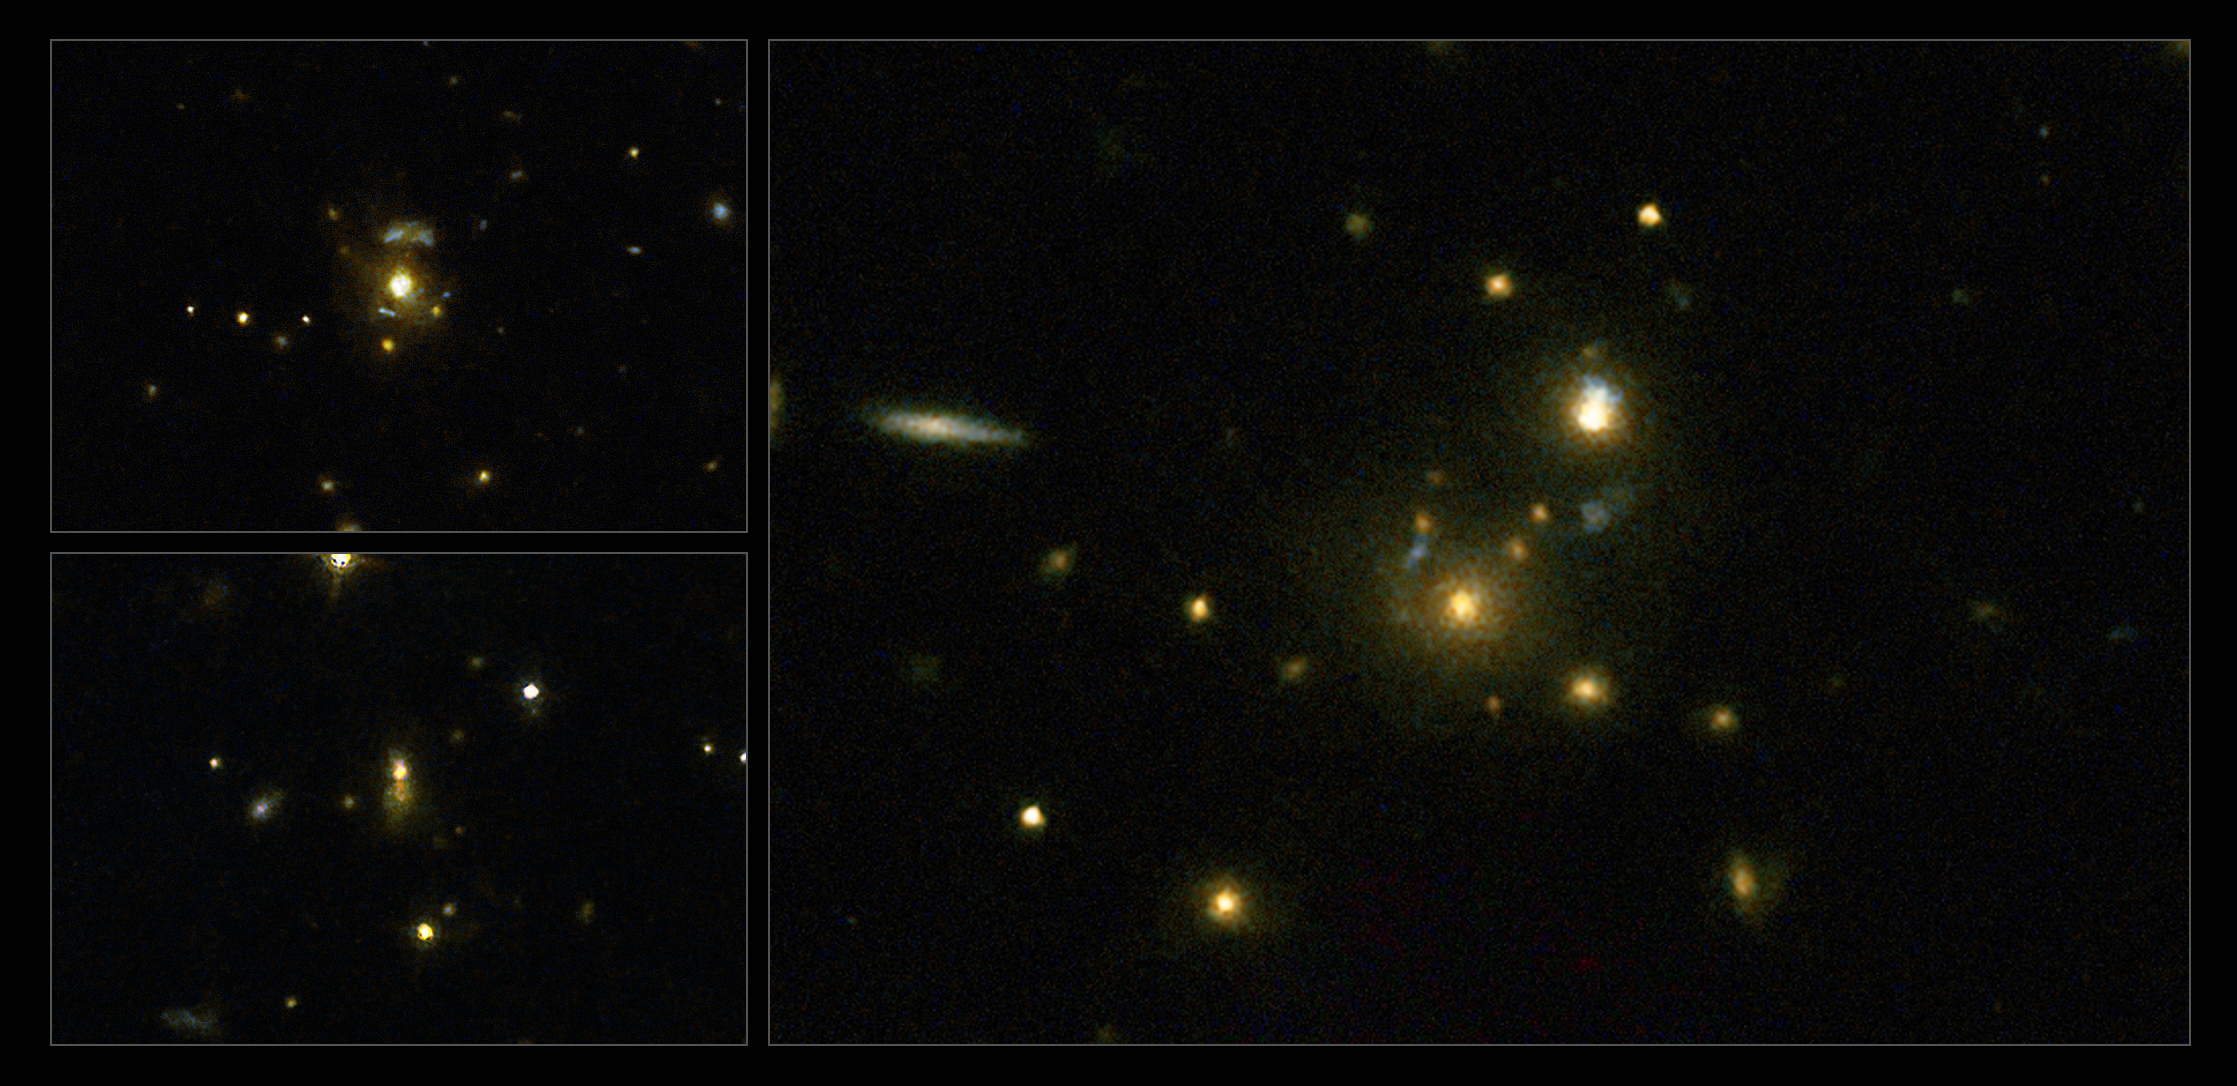

Galaxies with relativistic jets

This image taken with the NASA/ESA Hubble Space Telescope shows a selection of galaxies used in a survey to confirm the link between mergers and high-speed jets from supermassive black holes. These galaxies have very strong emissions at radio wavelengths, implying that the supermassive black holes they host are feeding huge outflows of plasma.

On the left (top to bottom) are the galaxies 3C 297 and 3C 454.1, on the right is 3C 356.

Credit: NASA, ESA, M. Chiaberge (STScI)